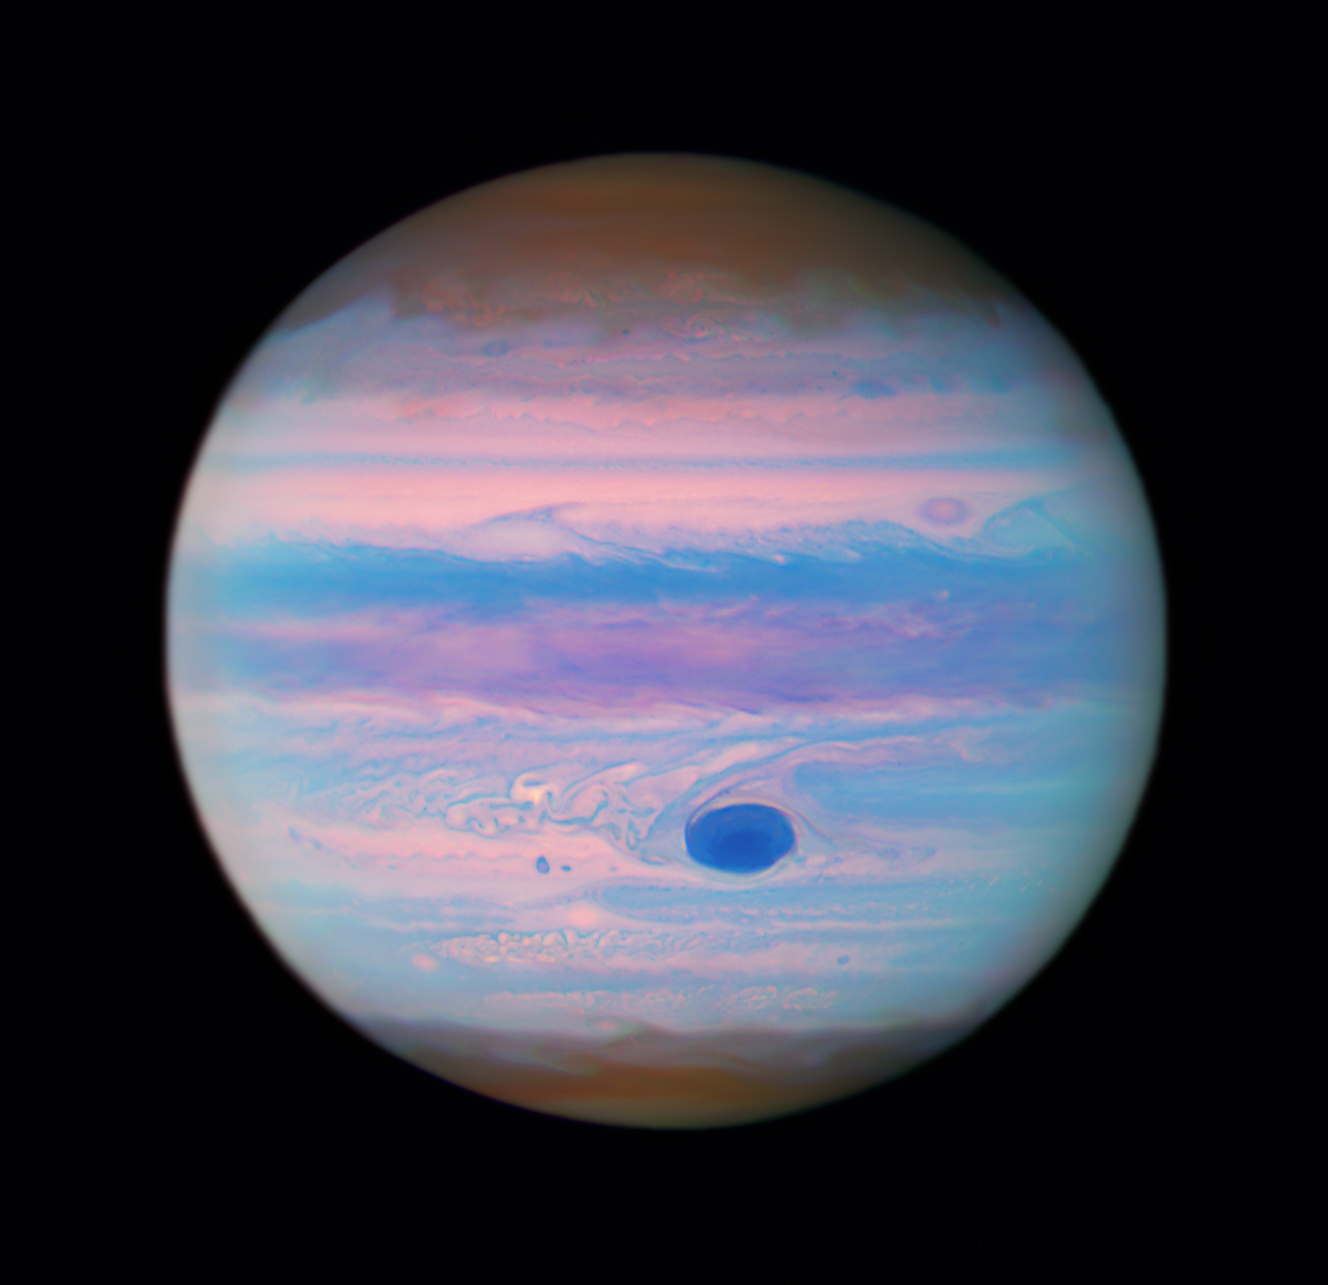

Jupiter in ultraviolet

This image from the NASA/ESA Hubble Space Telescope shows the planet Jupiter in a color composite of ultraviolet wavelengths.

The Great Red Spot appears red to the human eye, however in this ultraviolet image it appears darker because high altitude haze particles absorb light at these wavelengths. The reddish, wavy polar hazes are absorbing slightly less of this light due to differences in either particle size, composition, or altitude.

The data used to create this ultraviolet image is part of a Hubble proposal that looked at Jupiter’s stealthy superstorm system.

Hubble has a long history of observing the outer planets. From the Comet Shoemaker-Levy 9 impacts to studying Jupiter's storms, Hubble's decades-long career and unique vantage point provide astronomers with valuable data to chart the evolution of this dynamic planet.

Hubble’s ultraviolet-observing capabilities allow astronomers to study the short, high-energy wavelengths of light beyond what the human eye can see. Ultraviolet light reveals fascinating cosmic phenomena, including light from the hottest and youngest stars embedded in local galaxies; the composition, densities, and temperatures of the material between stars; and the evolution of galaxies.

This is a false-color image because the human eye cannot detect ultraviolet light. Therefore, colors in the visible light spectrum were assigned to the images, each taken with a different ultraviolet filter. In this case, the assigned colors for each filter are: Blue: F225W, Green: F275W, and Red: F343N.

Credit: NASA, ESA, M. Wong (University of California - Berkeley), G. Kober (NASA/Catholic University of America)